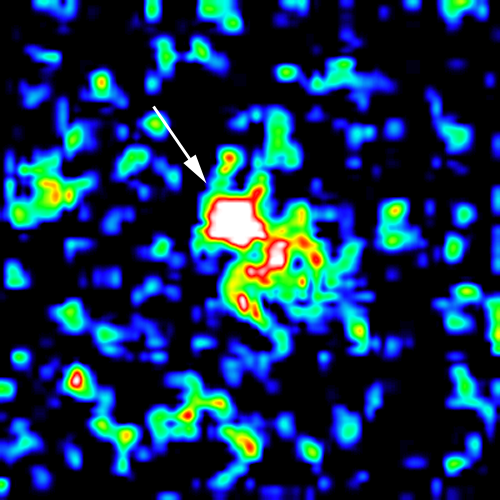

Optical Counterpart of Gamma Ray Burst

This is a false-color Hubble Space Telescope image of the visible fireball which accompanied the gamma ray burst called GRB 970228. This is the first optical image ever taken which associates a gamma-ray burst source with a potential host galaxy. This observation provides strong supporting evidence that gamma-ray bursts are cosmological - they originate in distant galaxies across the universe.

Credit: K. Sahu, M. Livio, L. Petro, D. Macchetto, STScI and NASA/ESA